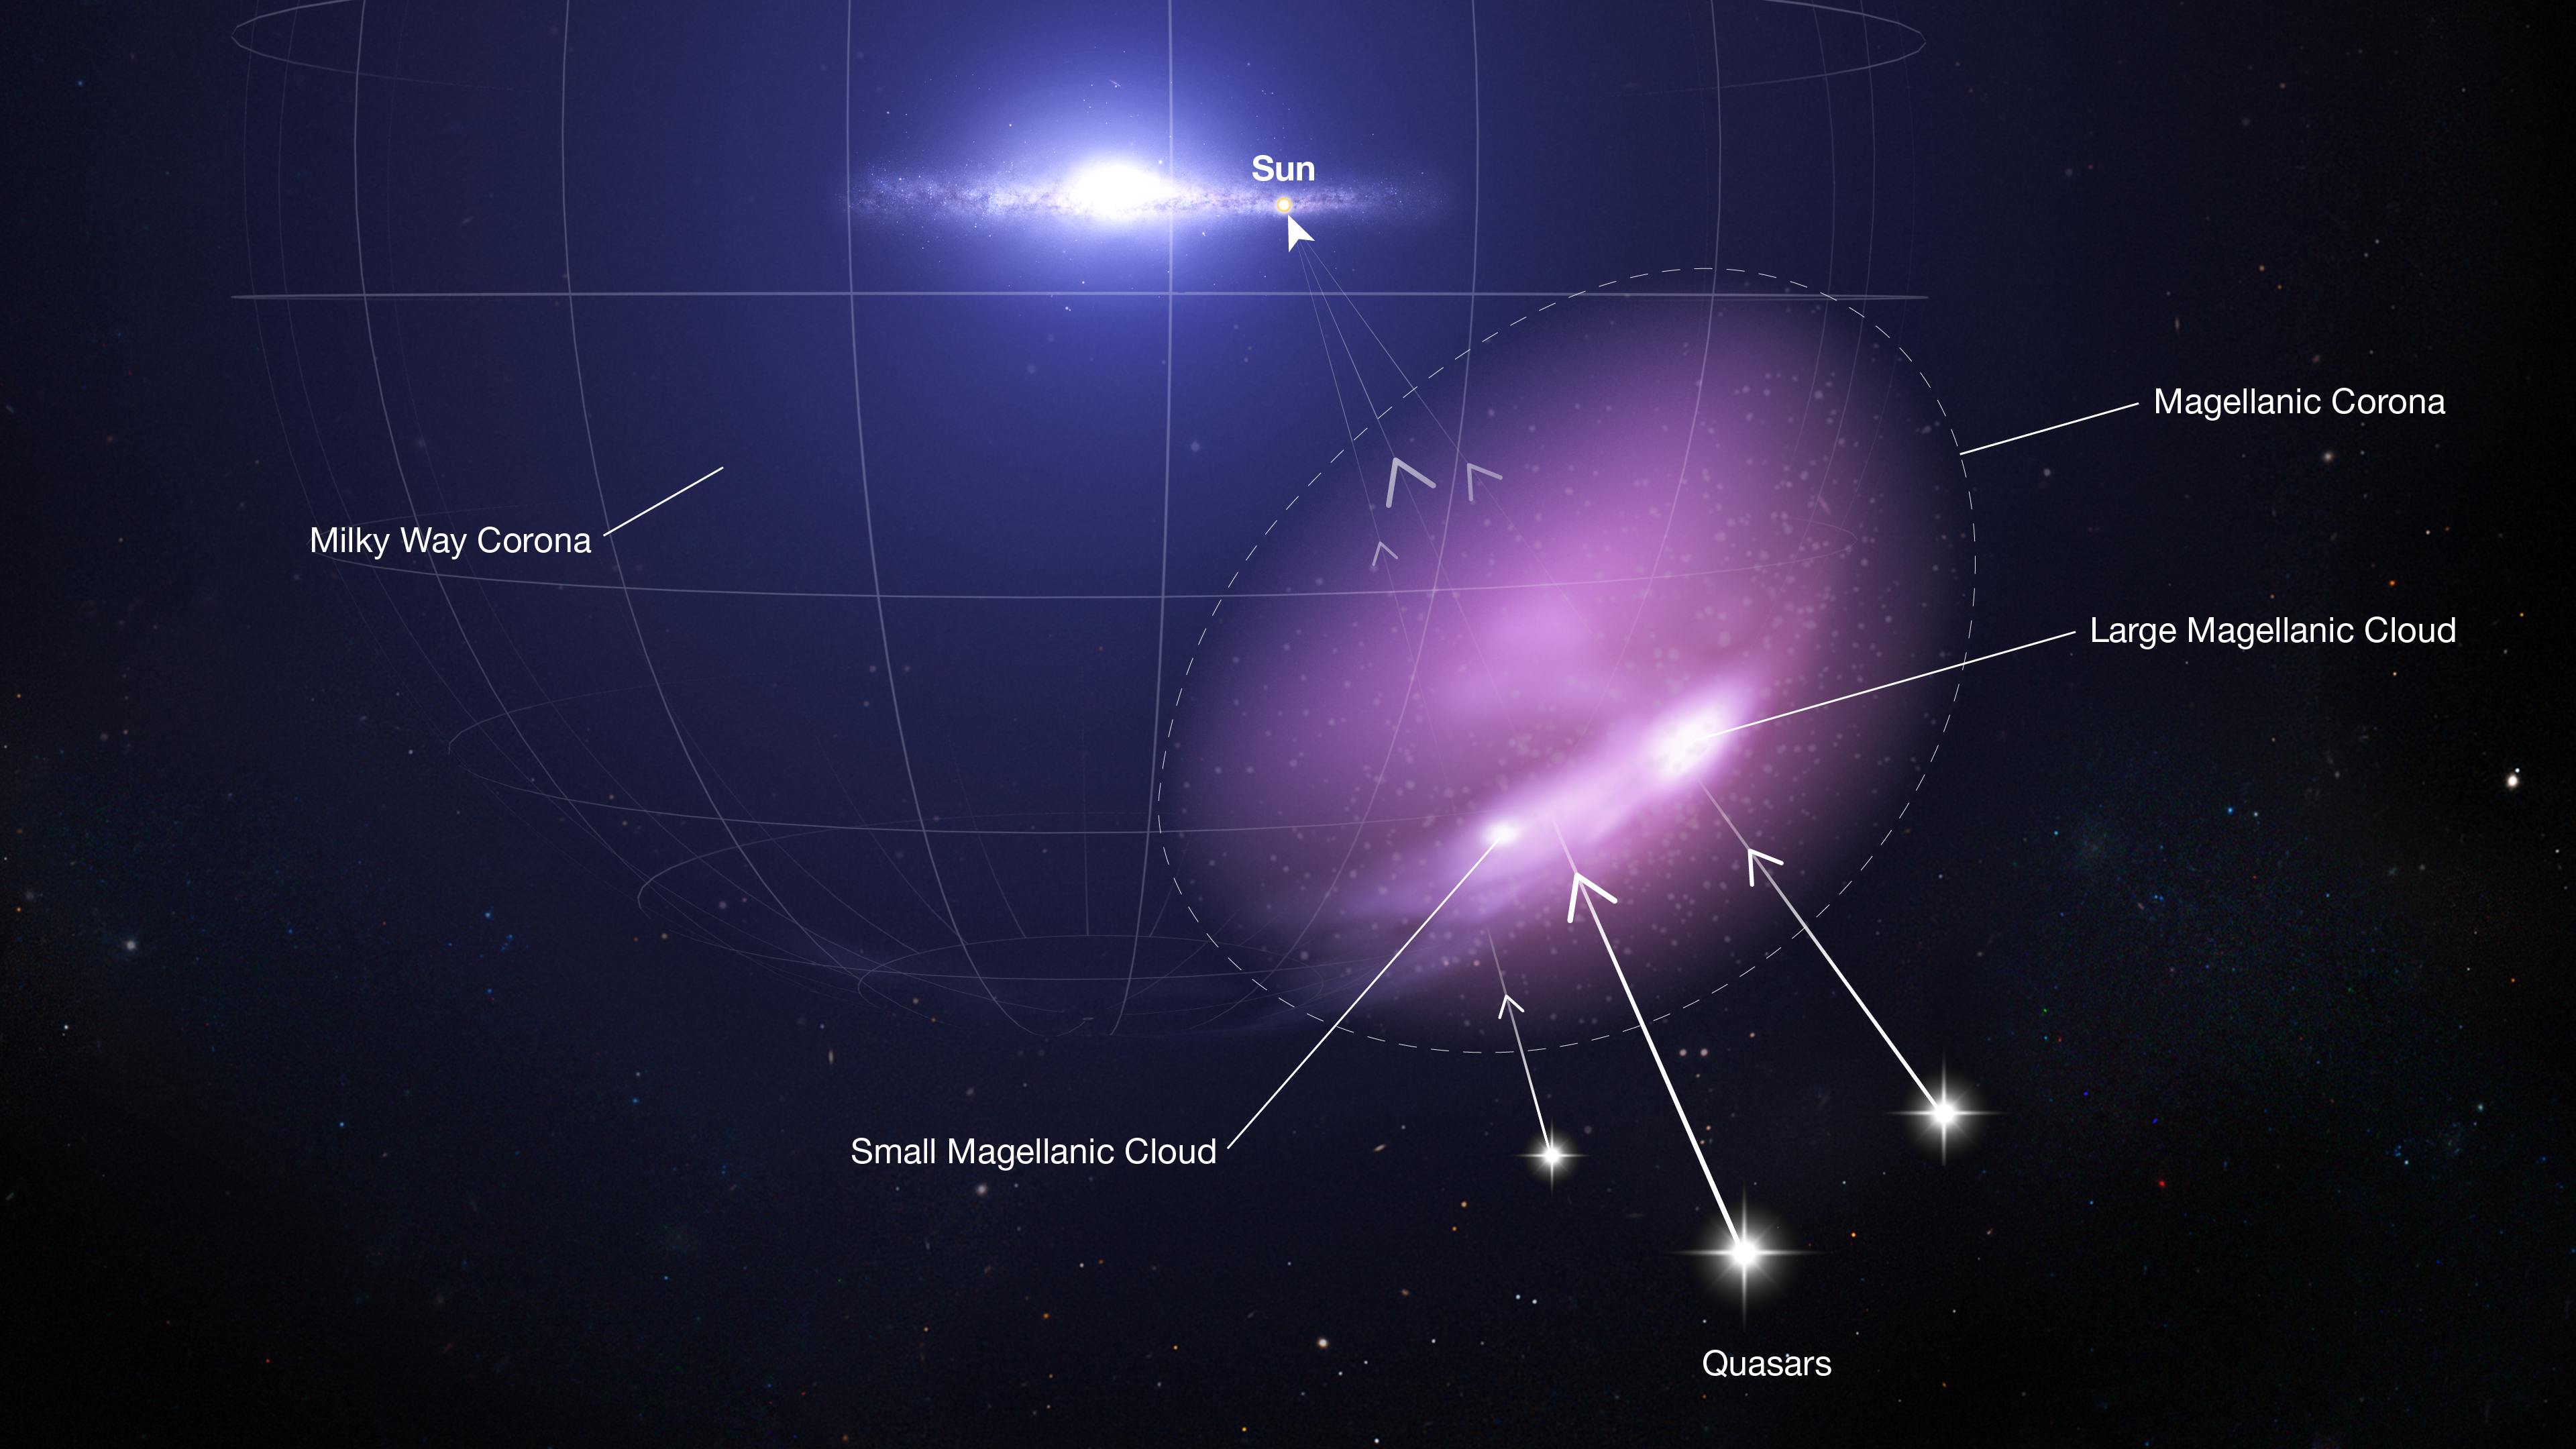

Hubble Detects Protective Shield Defending a Pair of Dwarf Galaxies

Researchers have used spectroscopic observations of ultraviolet light from quasars to detect and map out the Magellanic Corona, a diffuse halo of hot, supercharged gas surrounding the Small and Large Magellanic Clouds. Shown here in purple, the corona stretches more than 100,000 light-years from the main mass of stars, gas, and dust that make up the Magellanic Clouds, intermingling with the hotter and more extensive corona that surrounds the Milky Way.

The Magellanic Clouds, dwarf galaxies roughly 160,000 light-years from Earth, are the largest of the Milky Way’s satellites and are thought to be on their first in-falling passage around the Milky Way. This journey has begun to unravel what were once barred spirals with multiple arms into more irregular-shaped galaxies with long tails of debris. The corona is thought to act as a buffer protecting the dwarf galaxies’ vital star-forming gas from the gravitational pull of the much larger Milky Way.

The detection of the Magellanic Corona was made by analysing patterns in ultraviolet light from 28 distant background quasars. As the quasar light passes through the corona, certain wavelengths (colours) of ultraviolet light are absorbed. The quasar spectra become imprinted with the distinct signatures of carbon, oxygen, and silicon ions that make up the corona gas. Because each quasar probes a different part of the corona, the research team was also able to show that the amount of gas decreases with distance from the centre of the Large Magellanic Cloud.

This study used archival observations of quasars from Hubble’s Cosmic Origins Spectrograph (COS) and the Far Ultraviolet Spectroscopic Explorer (FUSE). Quasars have also been used to probe the Magellanic Stream, outflows from the Milky Way , and the halo surrounding the Andromeda Galaxy.

Credit: STScI, L. Hustak